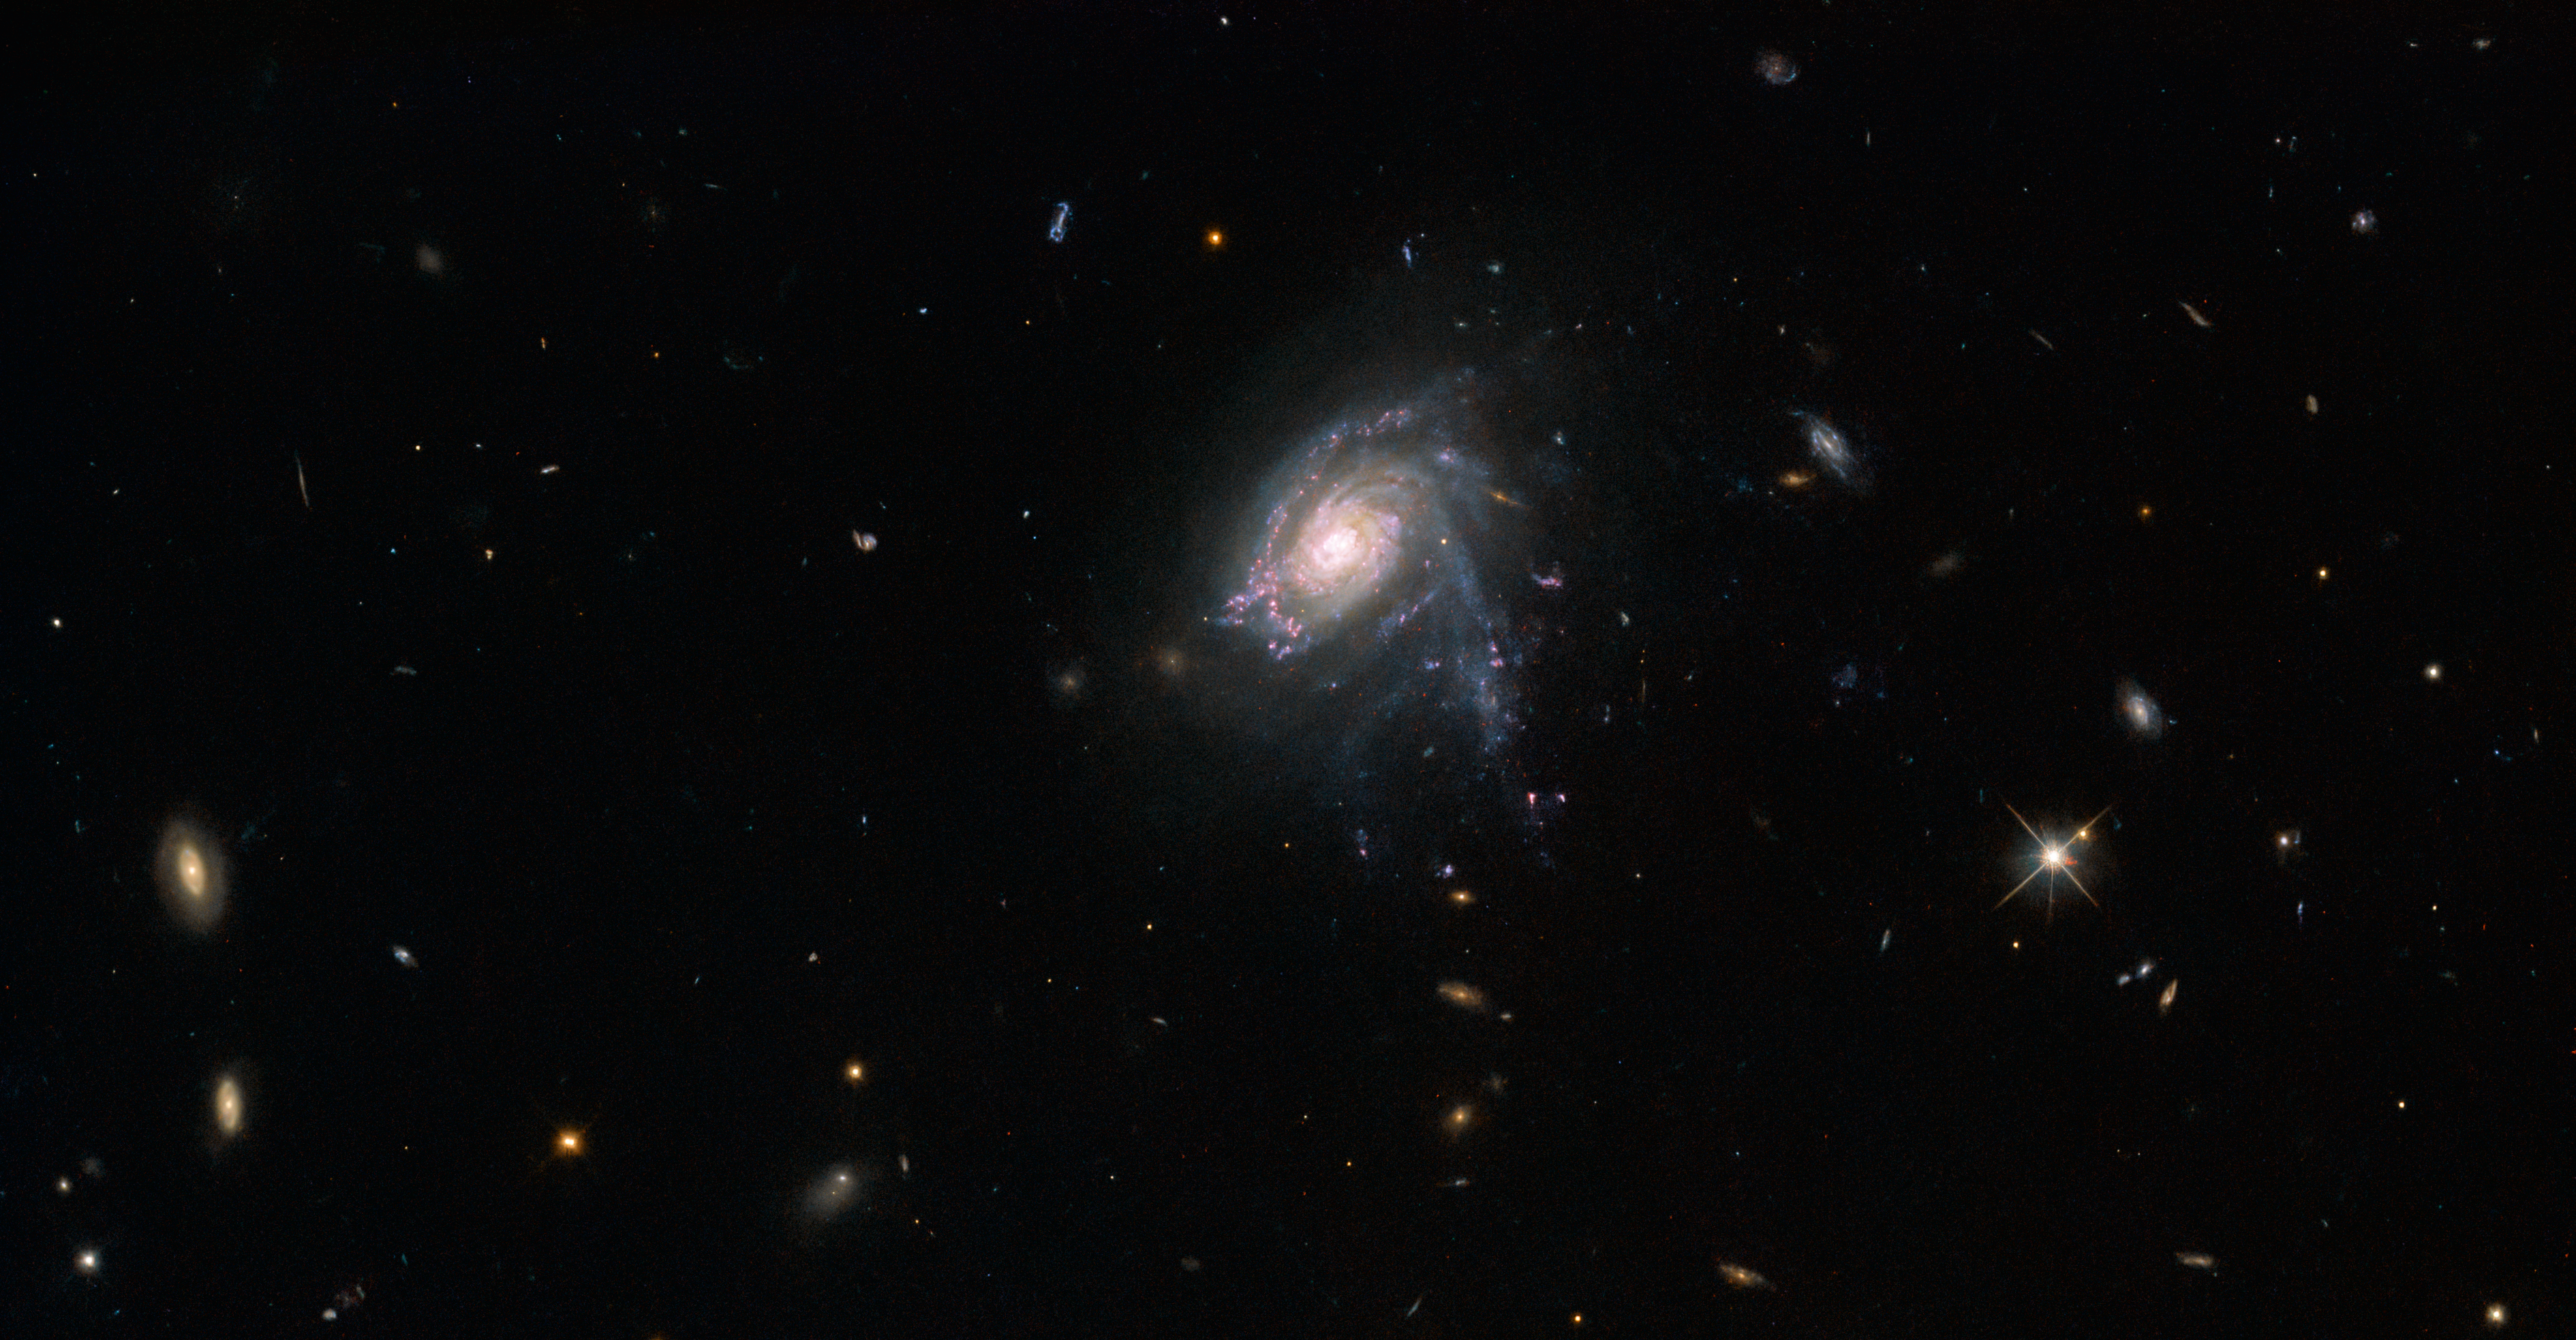

Ghostly galactic jellyfish

The jellyfish galaxy JO175 appears to hang suspended in this image from the NASA/ESA Hubble Space Telescope. This galaxy lies over 650 million light-years from Earth in the appropriately-named constellation Telescopium, and was captured in crystal-clear detail by Hubble’s Wide Field Camera 3. A handful of more distant galaxies are lurking throughout the scene, and a bright four-pointed star lies to the lower right side.

Jellyfish galaxies get their unusual name from the tendrils of star-forming gas and dust that trail behind them, just like the tentacles of a jellyfish. These bright tendrils contain clumps of star formation and give jellyfish galaxies a particularly striking appearance. Unlike their ocean-dwelling namesakes, jellyfish galaxies make their homes in galaxy clusters, and the pressure of the tenuous superheated plasma that permeates these galaxy clusters is what draws out the jellyfish galaxies’ distinctive tendrils.

Hubble recently completed a deep dive into jellyfish clusters, specifically the star-forming clumps of gas and dust that stud their tendrils. By studying the origins and fate of the stars in these clumps, astronomers hoped to better understand the processes underpinning star formation elsewhere in the Universe. Interestingly, their research suggests that star formation in the discs of galaxies is similar to star formation in the extreme conditions found in the tendrils of jellyfish galaxies.

Credit: ESA/Hubble & NASA, M. Gullieuszik and the GASP team